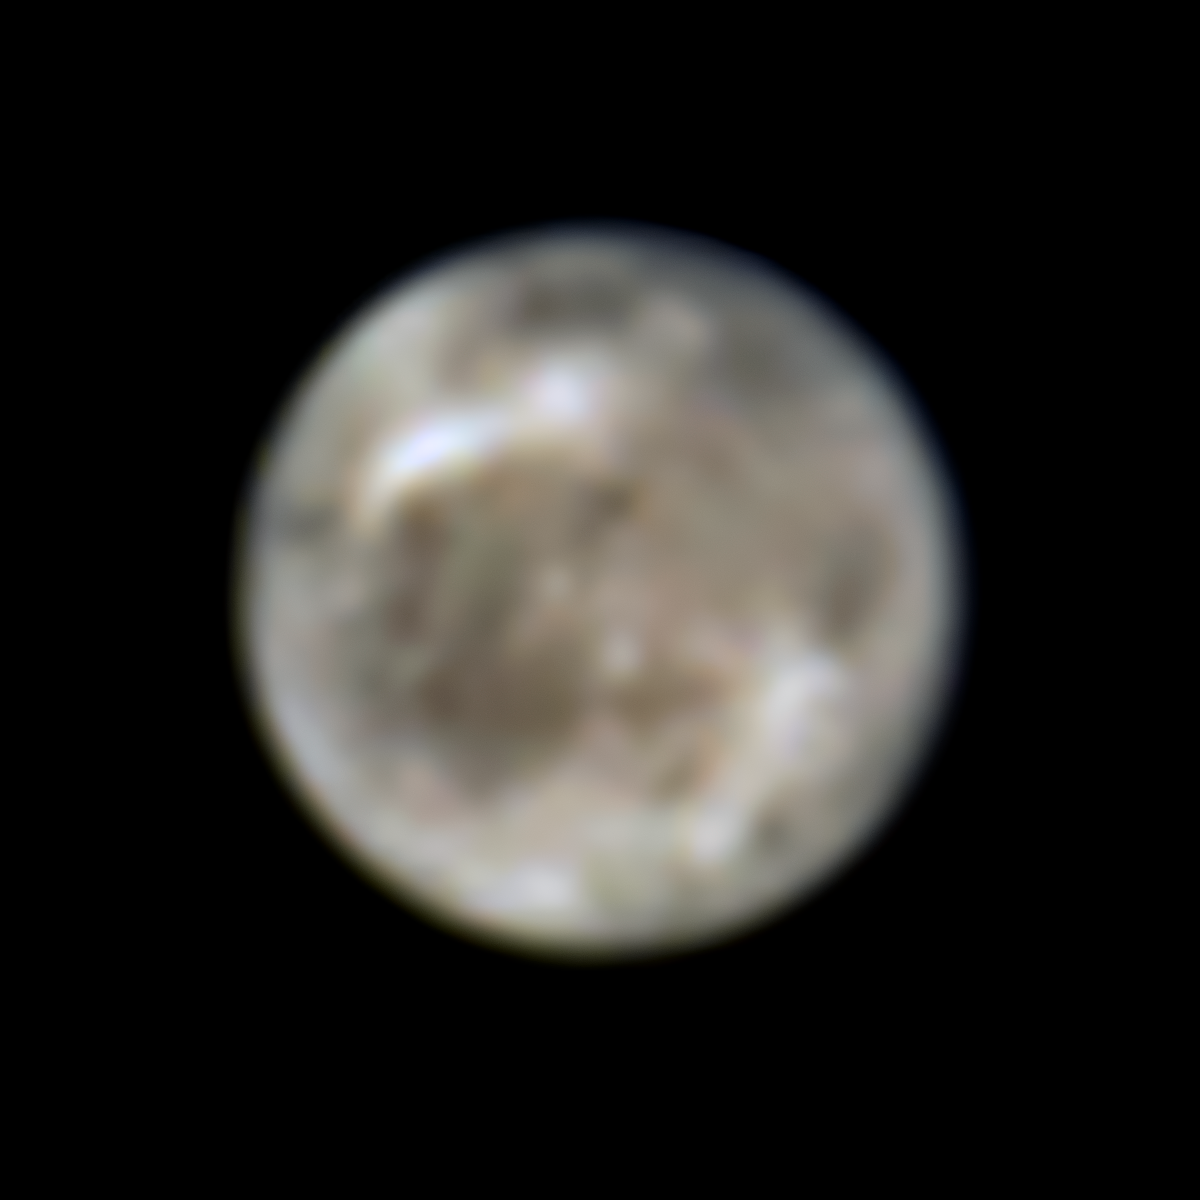

Hubble’s View of Ganymede in 1996

This image presents Jupiter’s moon Ganymede as seen by the NASA/ESA Hubble Space Telescope in 1996. Located over 600 million kilometres away, Hubble can follow changes on the moon and reveal other characteristics at ultraviolet and near-infrared wavelengths.

Astronomers have now used archival datasets from Hubble to reveal the first evidence for water vapour in the atmosphere of Jupiter’s moon Ganymede, the result of the thermal escape of water vapour from the moon’s icy surface.

Credit: ESA/Hubble, NASA, J. Spencer